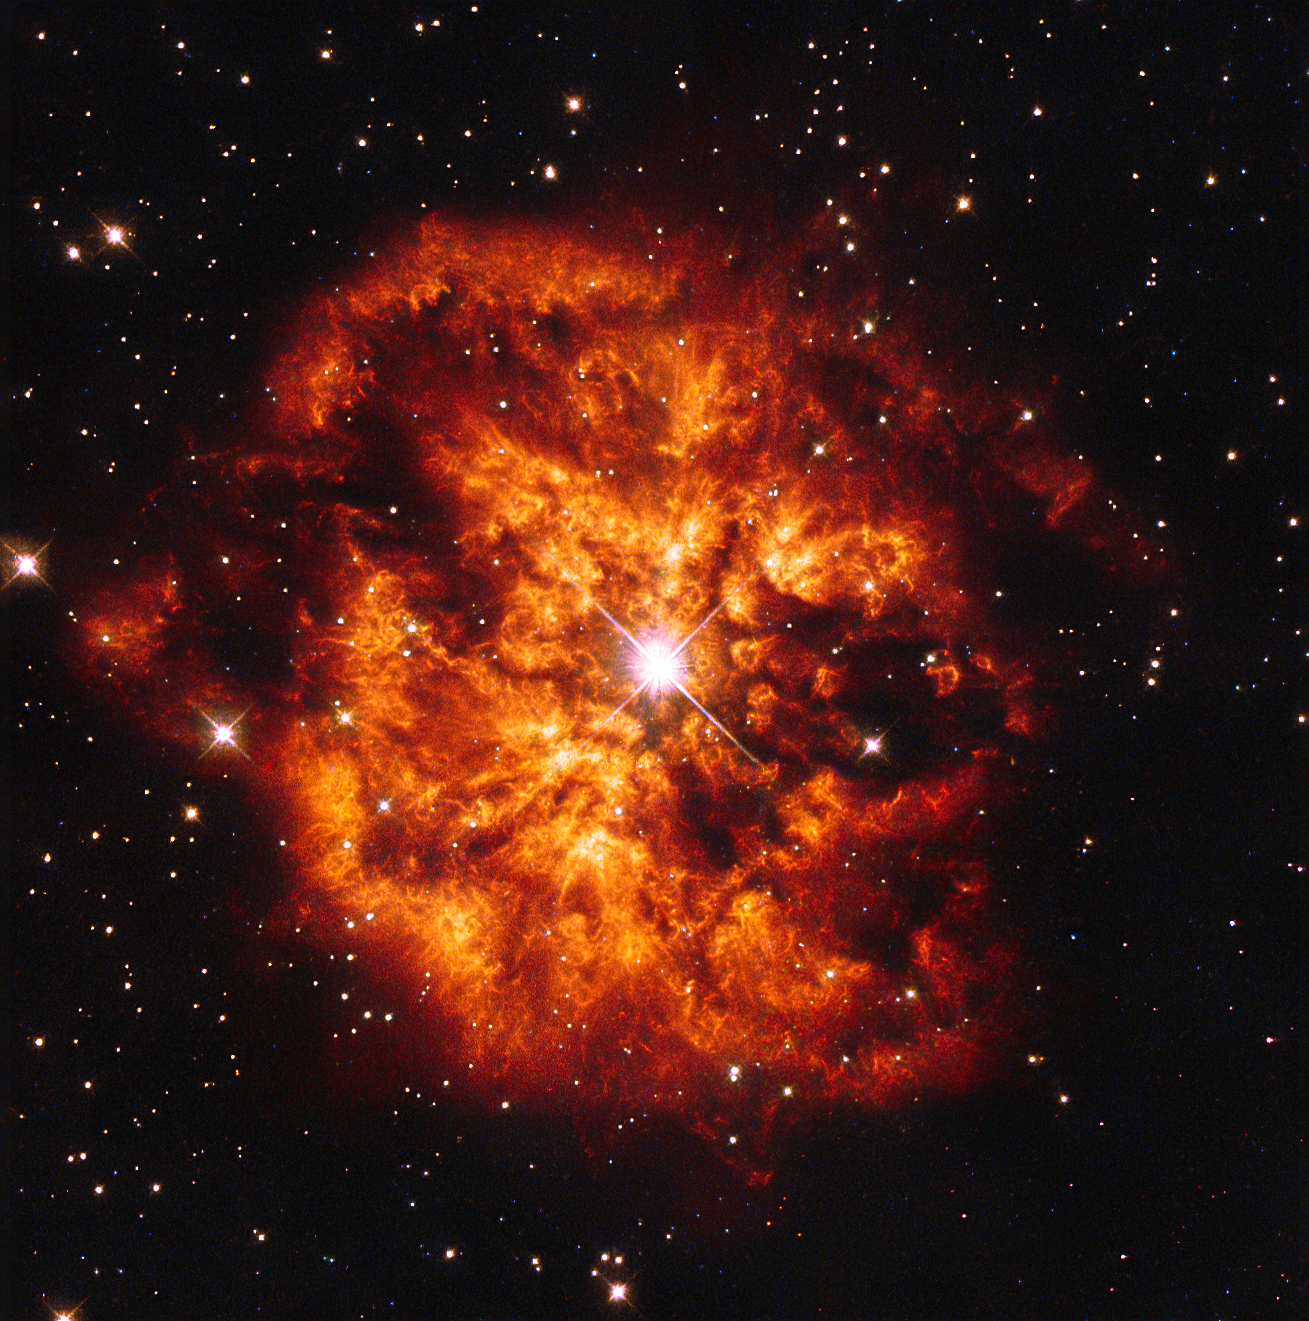

A cosmic couple

Here we see the spectacular cosmic pairing of the star Hen 2-427 — more commonly known as WR 124 — and the nebula M1-67 which surrounds it. Both objects, captured here by the NASA/ESA Hubble Space Telescope are found in the constellation of Sagitta and lie 15 000 light-years away.

The star Hen 2-427 shines brightly at the very centre of this explosive image and around the hot clumps of gas are ejected into space at over 150 000 kilometres per hour.

Hen 2-427 is a Wolf–Rayet star, named after the astronomers Charles Wolf and Georges Rayet. Wolf–Rayet are super-hot stars characterised by a fierce ejection of mass.

The nebula M1-67 is estimated to be no more than 10 000 years old — just a baby in astronomical terms — but what a beautiful and magnificent sight it makes.

A version of this image was released in 1998, but has now been re-reduced with the latest software.

Credit: ESA/Hubble & NASA Acknowledgement: Judy Schmidt (geckzilla.com)